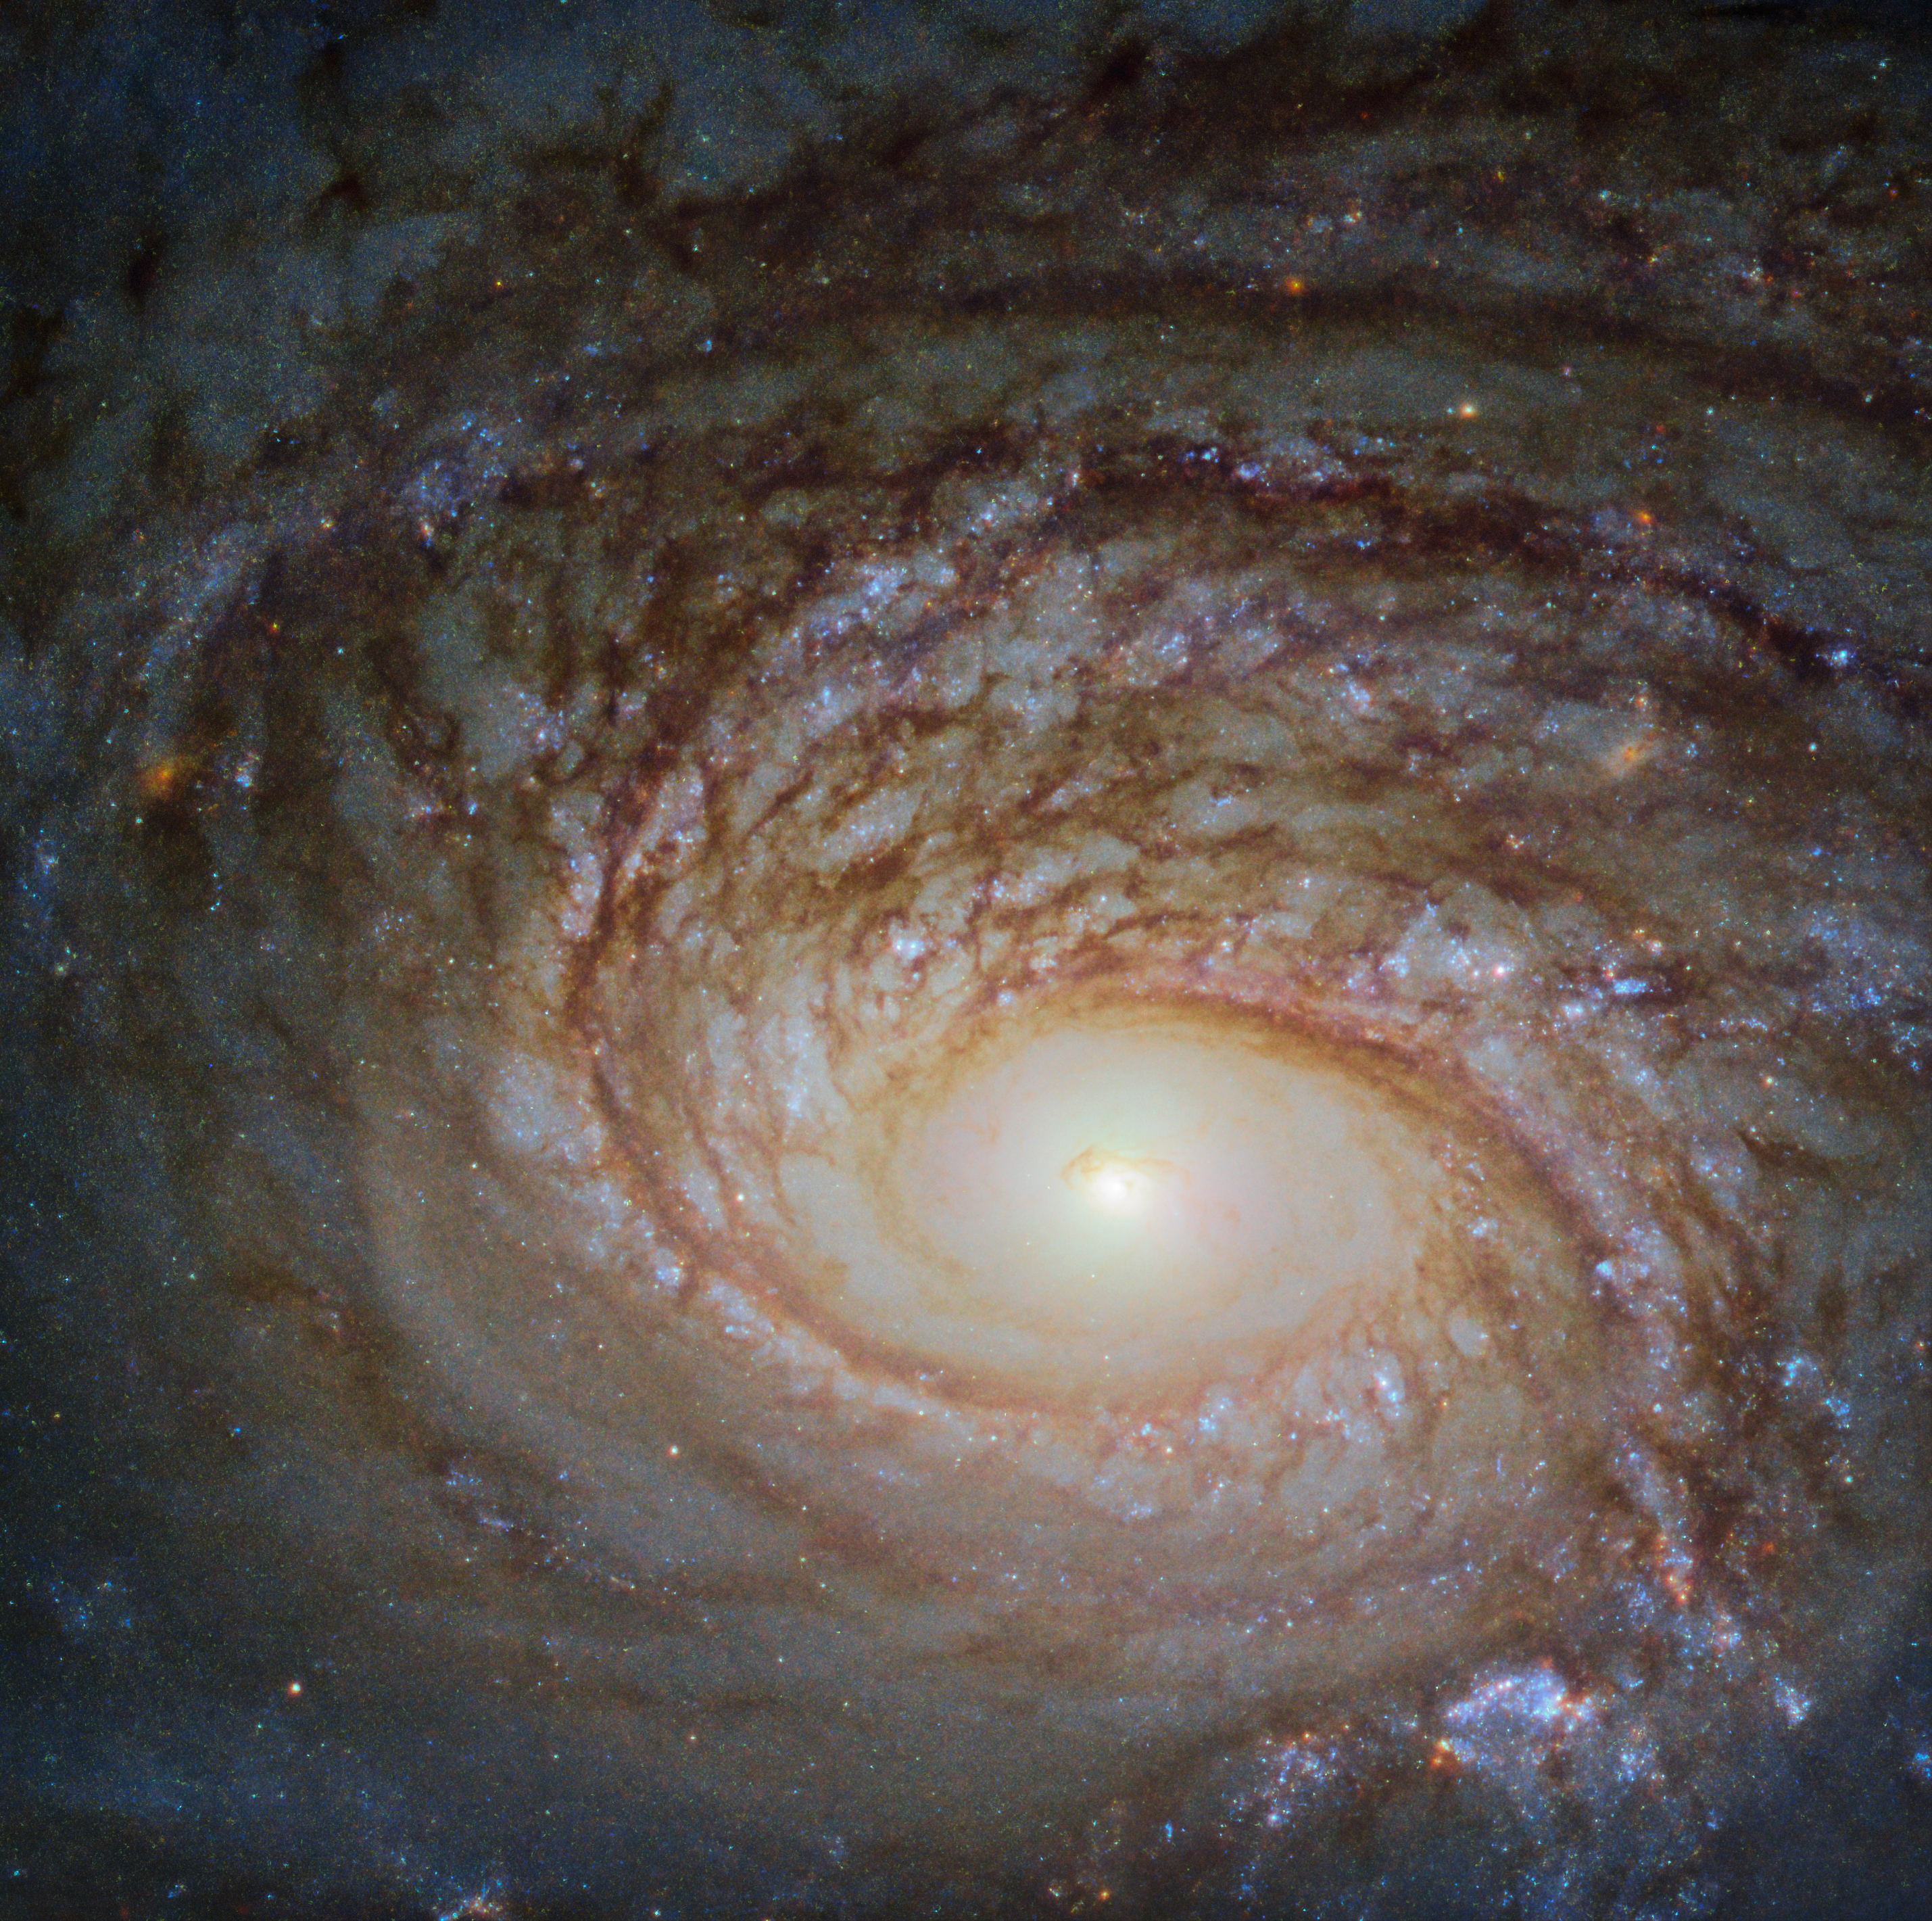

A Rival to the Milky Way

The Universe is simply so vast that it can be difficult to maintain a sense of scale. Many galaxies we see through telescopes such as the NASA/ESA Hubble Space Telescope, the source of this beautiful Picture of the Week, look relatively similar: spiralling arms, a glowing centre, and a mixture of bright specks of star formation and dark ripples of cosmic dust weaving throughout.

This galaxy, a spiral galaxy named NGC 772, is no exception. It actually has much in common with our home galaxy, the Milky Way. Each boasts a few satellite galaxies, small galaxies that closely orbit and are gravitationally bound to their parent galaxies. One of NGC 772’s spiral arms has been distorted and disrupted by one of these satellites (NGC 770 — not visible in the image here), leaving it elongated and asymmetrical.

However, the two are also different in a few key ways. For one, NGC 772 is both a peculiar and an unbarred spiral galaxy; respectively, this means that it is somewhat odd in size, shape, or composition, and that it lacks a central feature known as a bar, which we see in many galaxies throughout the cosmos — including the Milky Way. These bars are built of gas and stars, and are thought to funnel and transport material through the galactic core, possibly fueling and igniting various processes such as star formation.

Credit: ESA/Hubble & NASA, A. Seth et al.